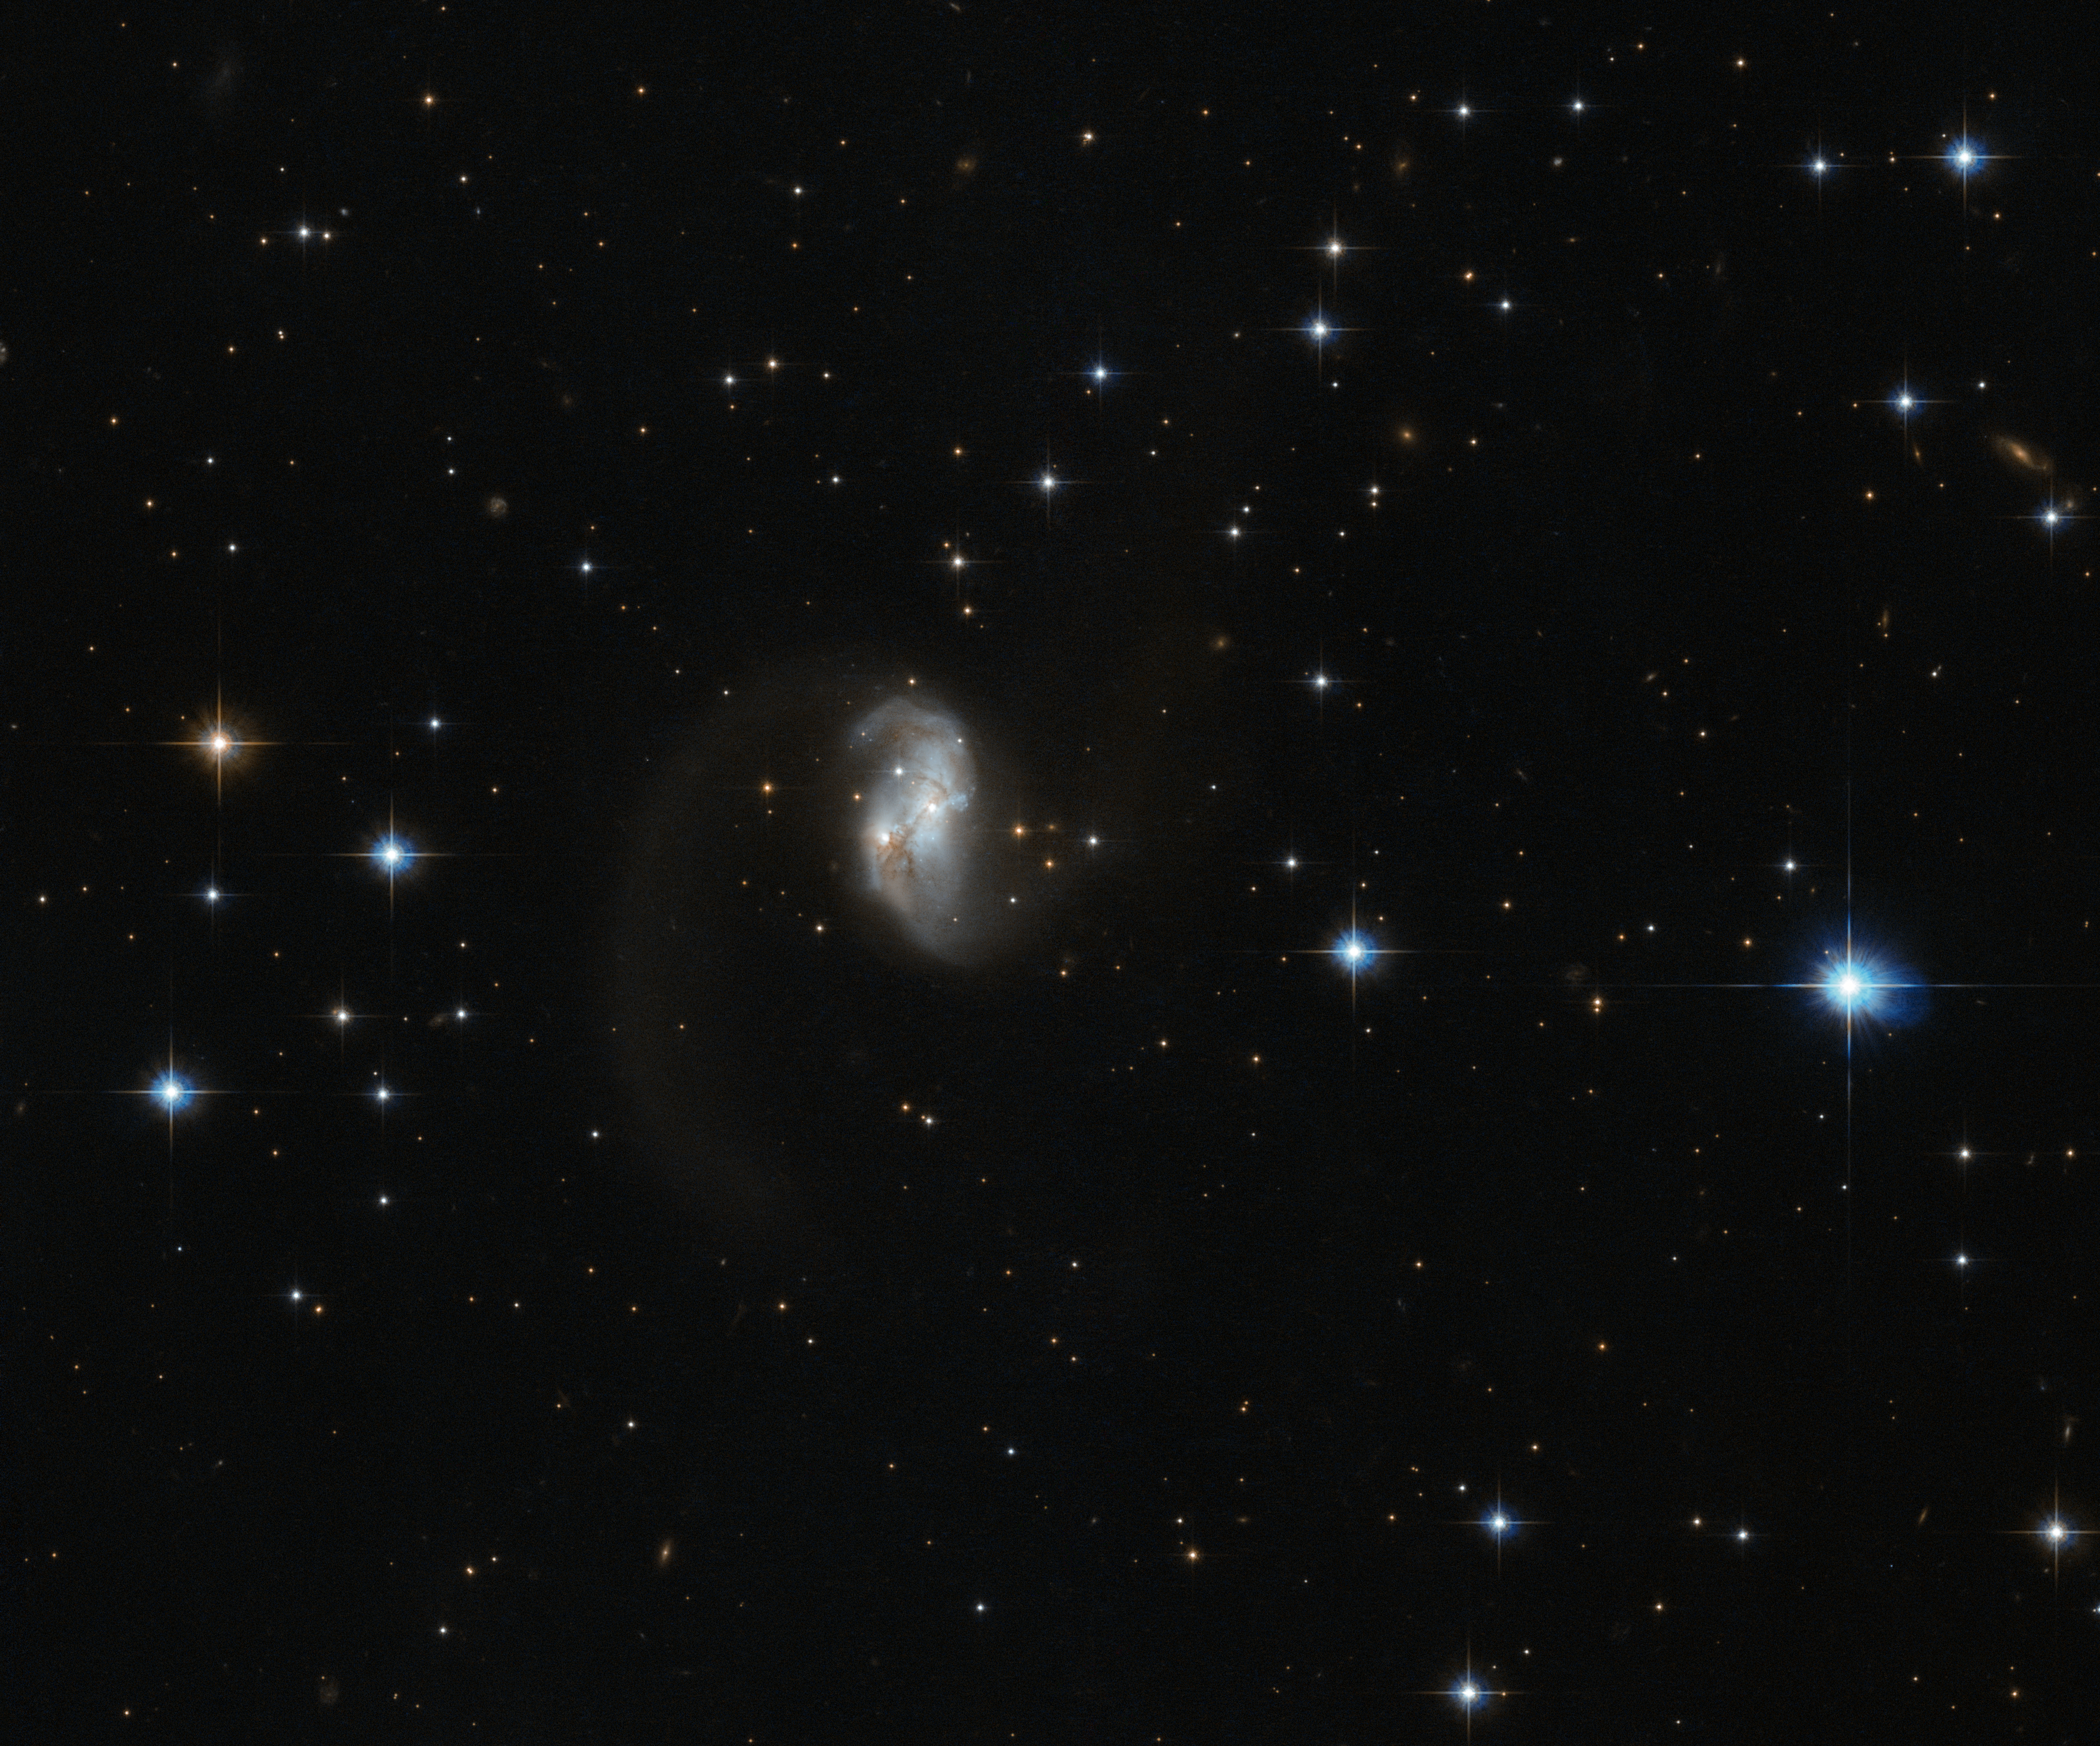

Galactic glow worm

This charming and bright galaxy, known as IRAS 23436+5257, was captured by the the NASA/ESA Hubble Space Telescope. It is located in the northern constellation of Cassiopeia, which is named after an arrogant, vain, and yet beautiful mythical queen.

The twisted, wormlike structure of this galaxy is most likely the result of a collision and subsequent merger of two galaxies. Such interactions are quite common in the Universe, and they can range from minor interactions involving a satellite galaxy being caught by a spiral arm, to major galactic crashes. Friction between the gas and dust during a collision can have a major effect on the galaxies involved, morphing the shape of the original galaxies and creating interesting new structures.

When you look up at the calm and quiet night sky it is not always easy to picture it as a dynamic and vibrant environment with entire galaxies in motion, spinning like children’s toys and crashing into whatever crosses their path. The motions are, of course, extremely slow, and occur over millions or even billions of years.

The aftermath of these galactic collisions helps scientists to understand how these movements occur and what may be in store for our own Milky Way, which is on a collision course with a neighbouring galaxy, Messier 31.

A version of this image was entered into the Hubble’s Hidden Treasures image processing competition by contestant Judy Schmidt. Hidden Treasures was an initiative to invite astronomy enthusiasts to search the Hubble archive for stunning images that have never been seen by the general public. The competition has now closed and the results are published here.

Credit: ESA/Hubble & NASA Acknowledgement: Judy Schmidt